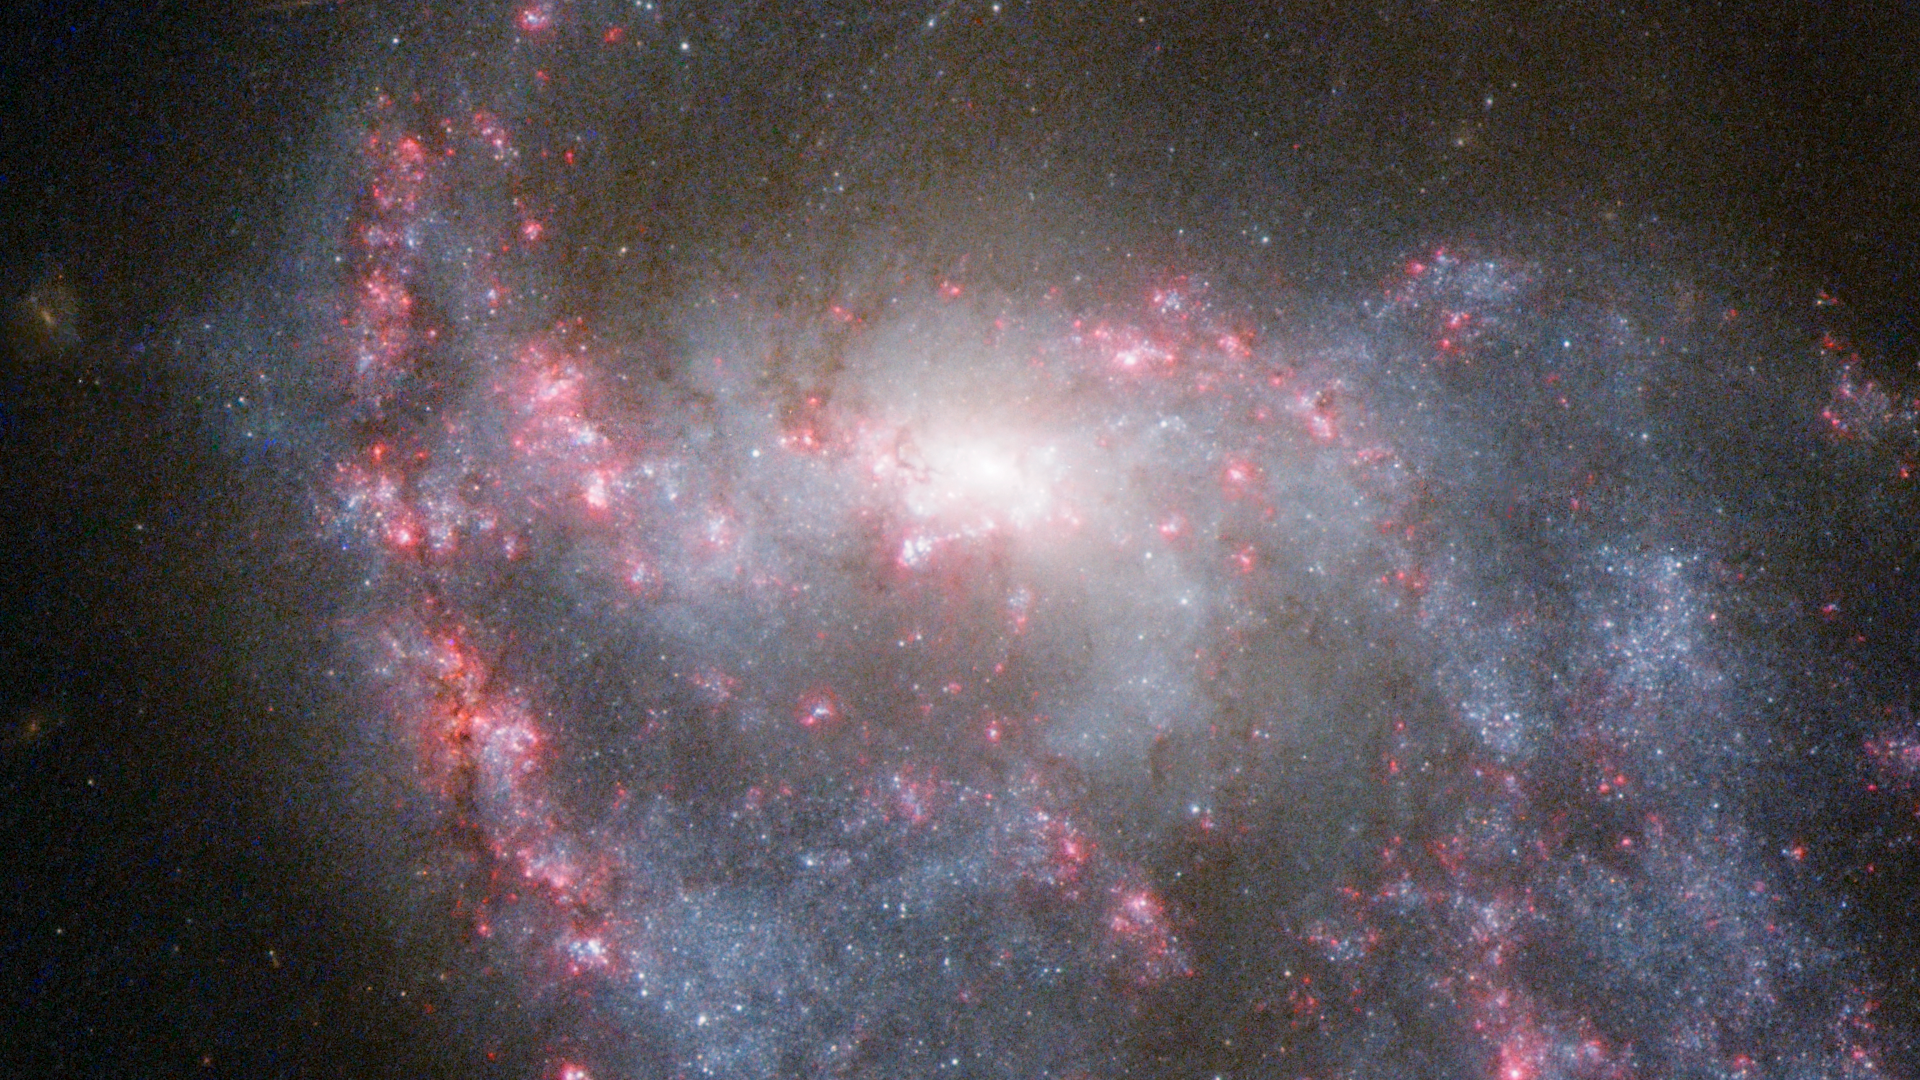

Hubble view of NGC 922

The galaxy NGC 922, featured in the Hubblecast 60. Watch the video on: http://www.spacetelescope.org/videos/heic1218a/

Credit: NASA & ESA